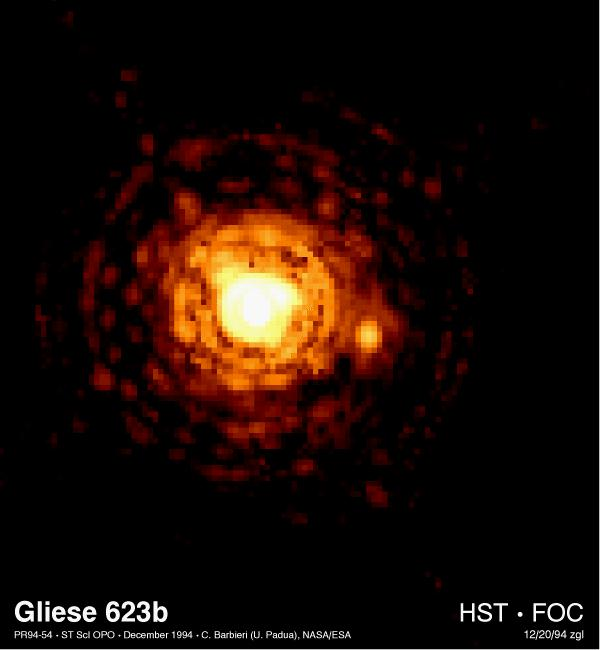

Gliese 623b

This Hubble Space Telescope picture resolves, for the first time, one of the smallest stars in our Milky Way Galaxy. Called Gliese 623b or Gl 623b, the diminutive star (right of center) is ten times less massive than the Sun and 60, 000 times fainter. (If it were as far away as the Sun, it would be only eight times brighter than the full Moon).

Credit: C. Barbieri (Univ. of Padua), and NASA/ESA